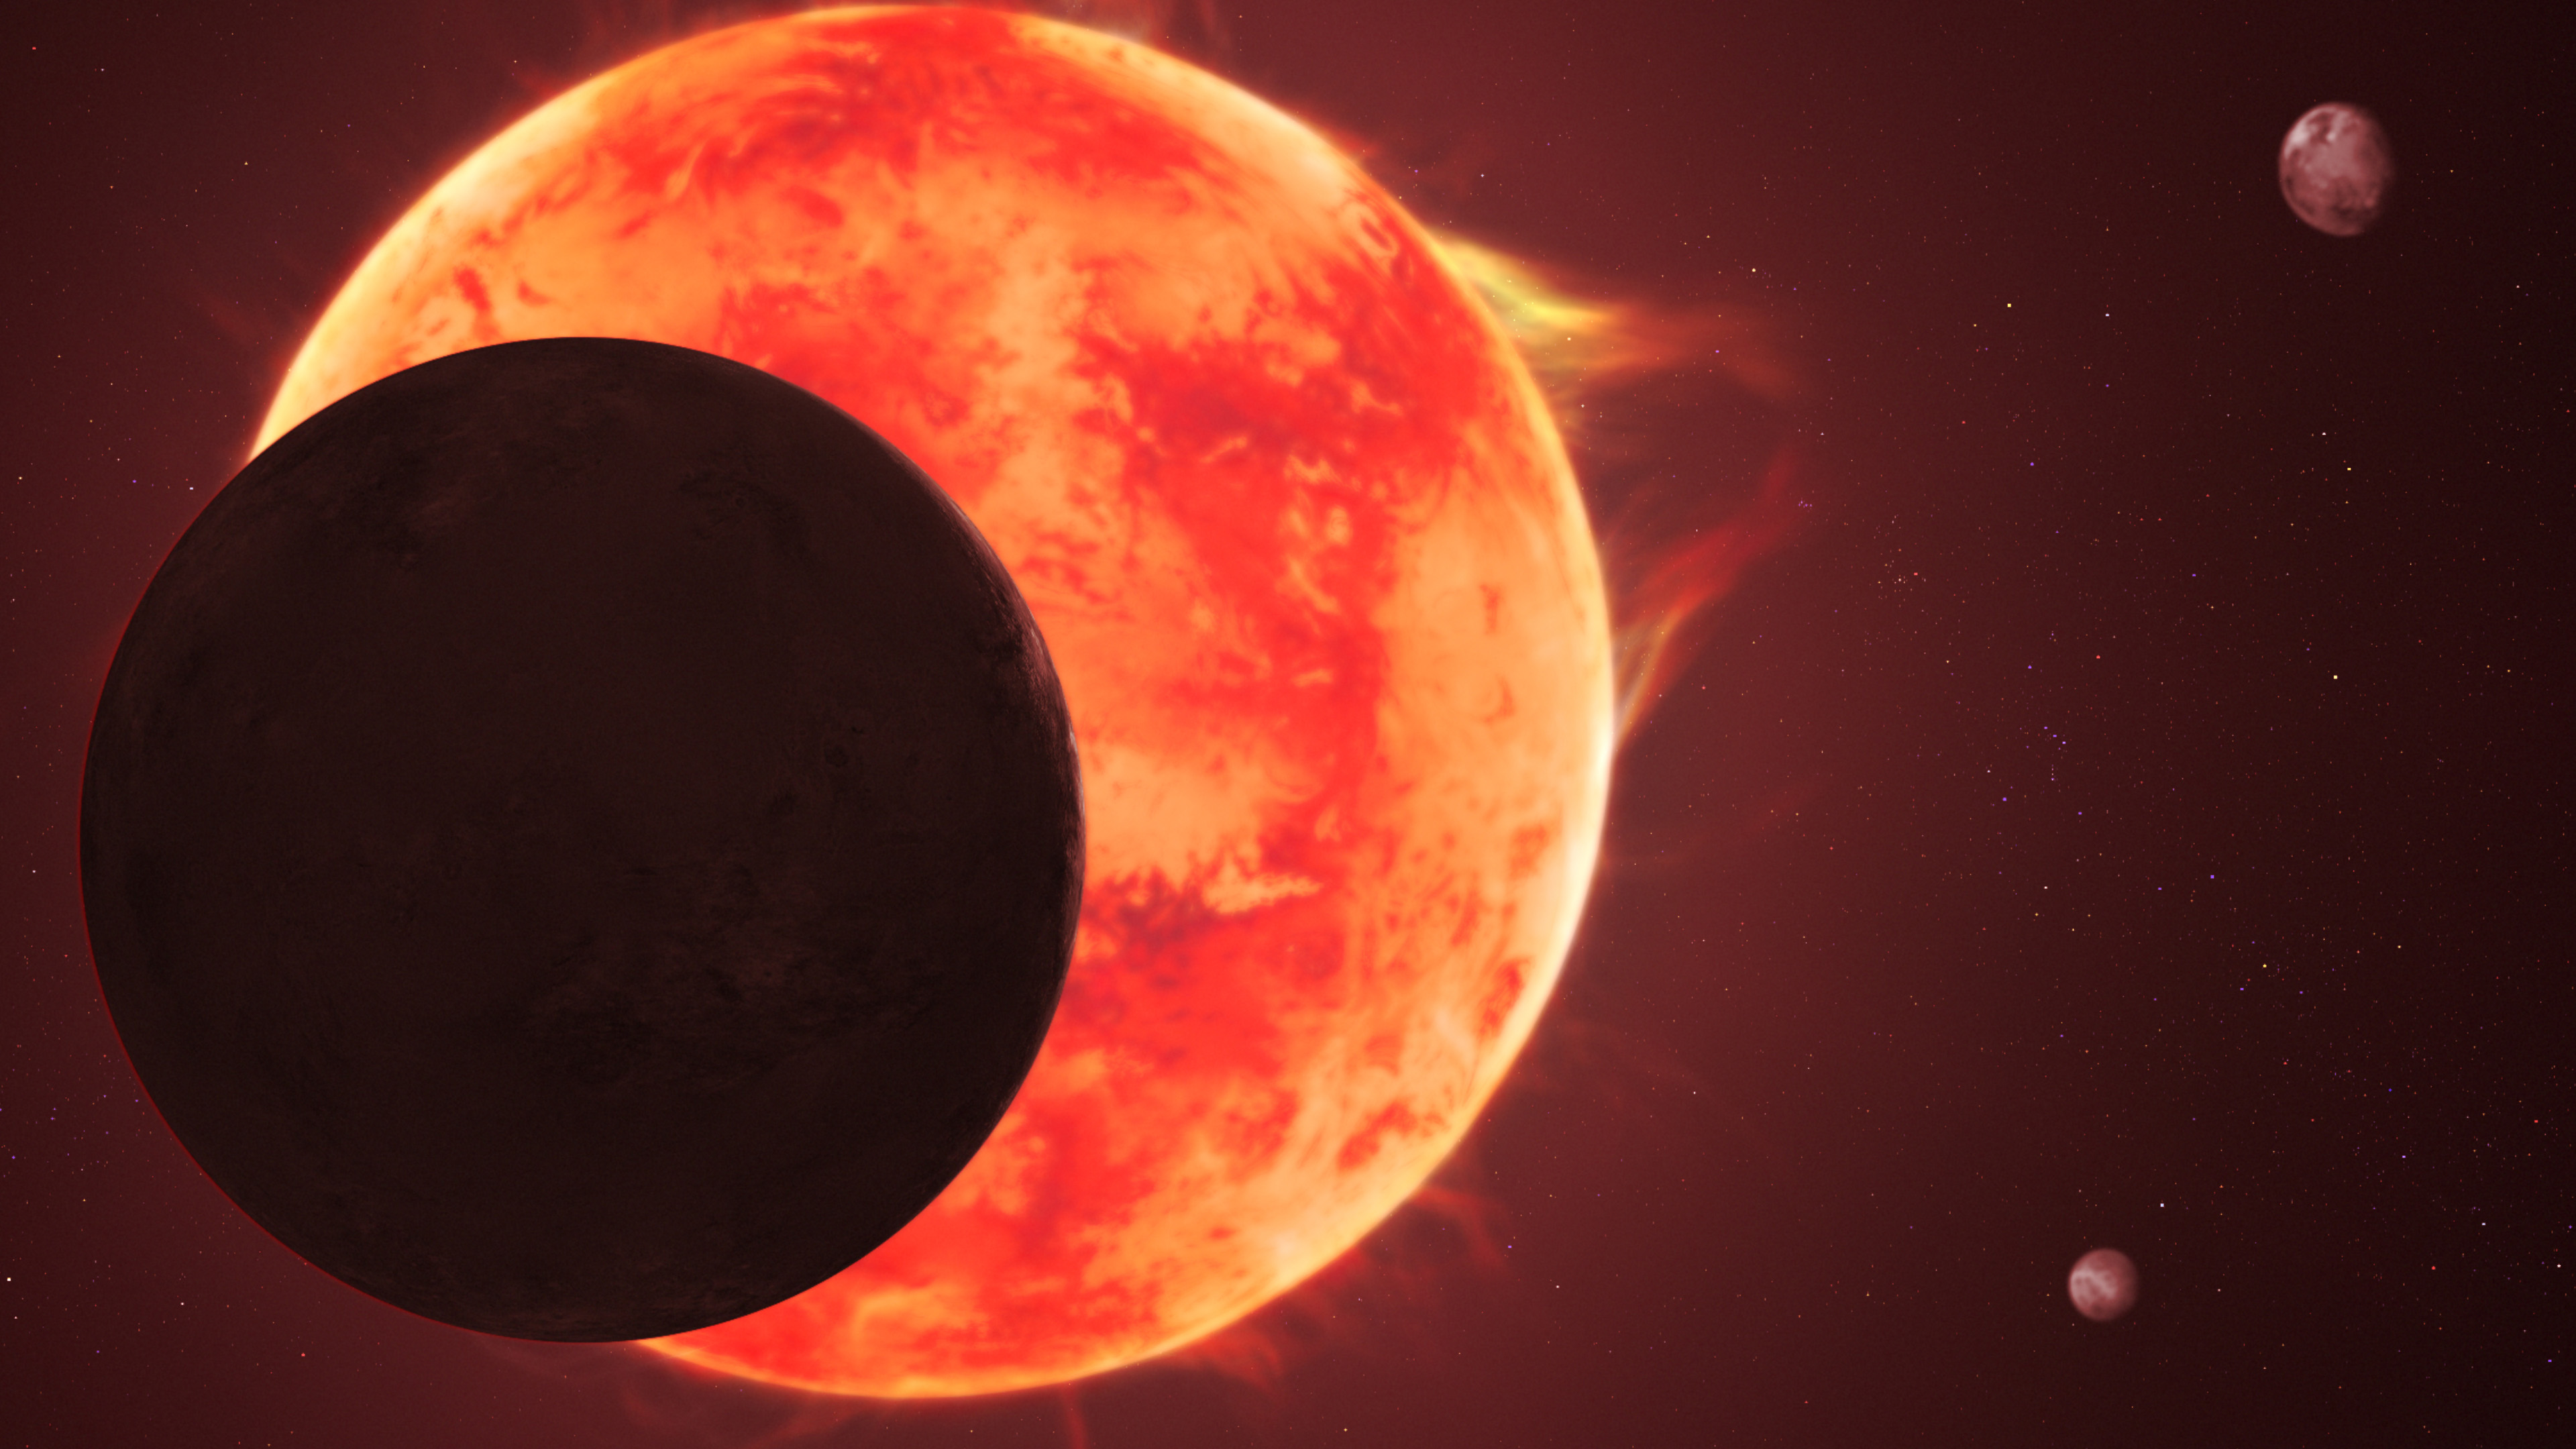

TRAPPIST-1 d (artist impression)

This artist’s concept depicts planet TRAPPIST-1 d passing in front of its turbulent star, with other members of the closely packed system shown in the background.

The TRAPPIST-1 system is intriguing to scientists for a few reasons. Not only does the system have seven Earth-sized rocky worlds, but its star is a red dwarf, the most common type of star in the Milky Way galaxy. If an Earth-sized world can maintain an atmosphere here, and thus have the potential for liquid surface water, the chance of finding similar worlds throughout the galaxy is much higher. In studying the TRAPPIST-1 planets, scientists are determining the best methods for separating starlight from potential atmospheric signatures in data from the NASA/ESA/CSA James Webb Space Telescope. The star TRAPPIST-1’s variability, with frequent flares, provides a challenging testing ground for these methods.

Credit: NASA, ESA, CSA, J. Olmsted (STScI)